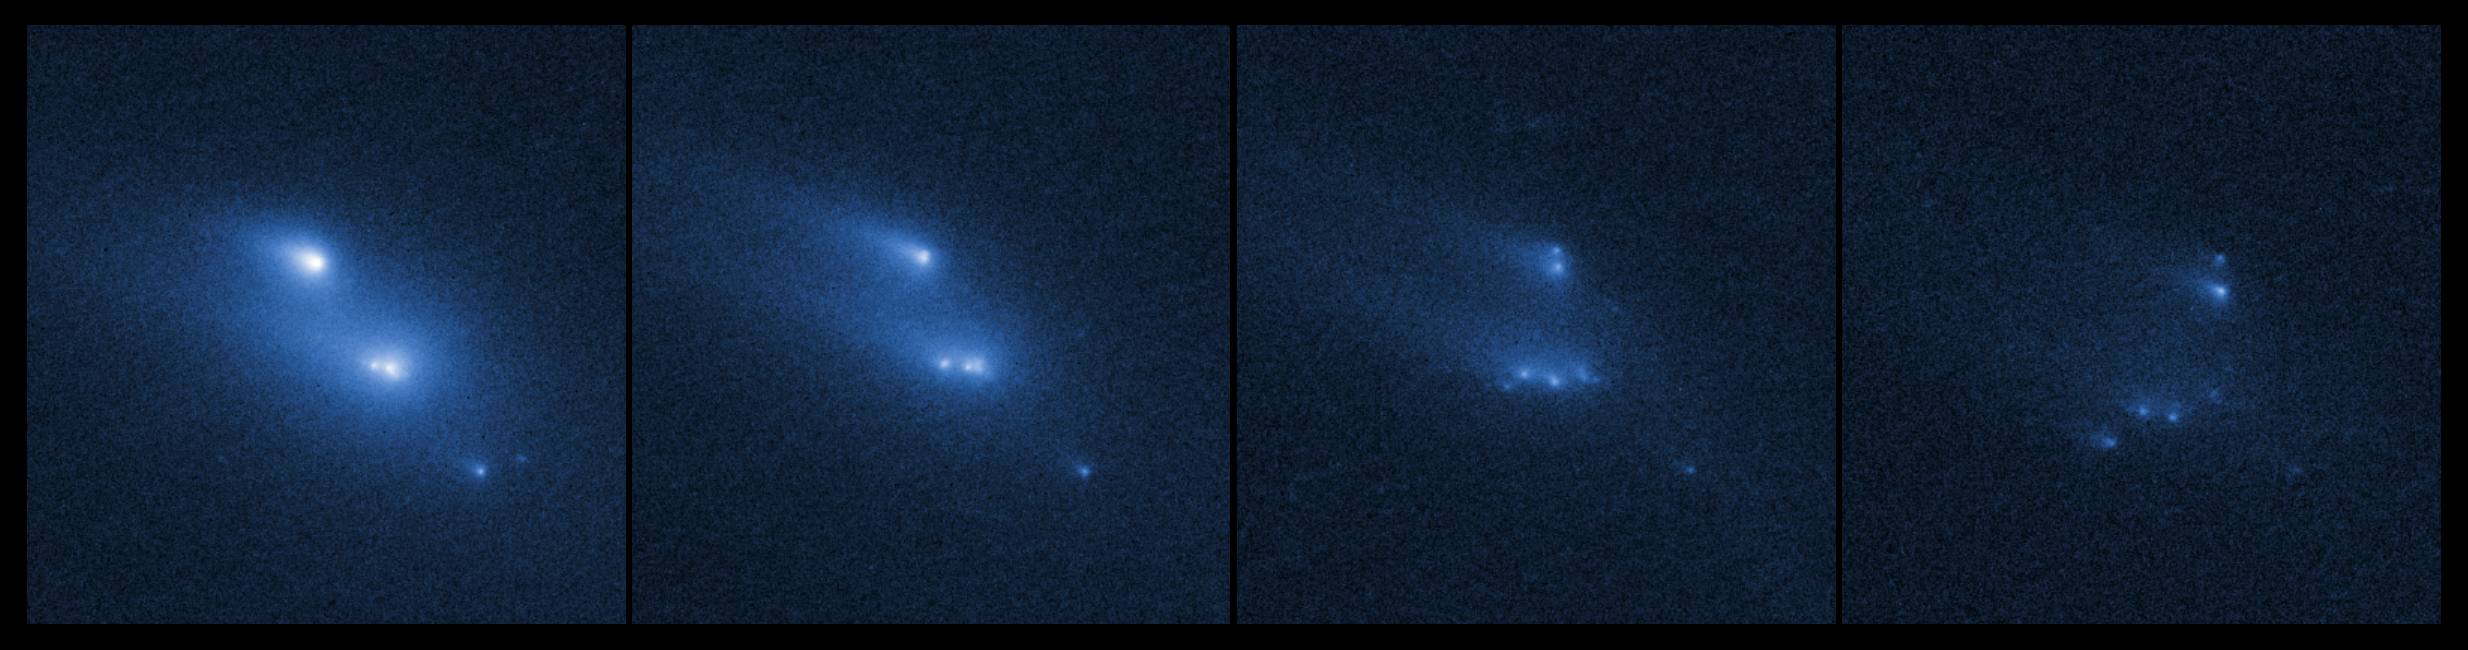

Asteroid P/2013 R3 breaks apart

This series of images shows the asteroid P/2013 R3 breaking apart, as viewed by the NASA/ESA Hubble Space Telescope in 2013. This is the first time that such a body has been seen to undergo this kind of break-up.

The Hubble observations showed that there are ten distinct objects, each with comet-like dust tails, embedded within the asteroid's dusty envelope. The four largest rocky fragments are up to 200 metres in radius, about twice the length of a football pitch.

The date increases from left to right, with frames from 29 October 2013, 15 November 2013, 13 December 2013, and 14 January 2014 respectively, showing how the clumps of debris material move around. The 14 January 2014 frame was not included in the science paper and is additional data.

Credit: NASA, ESA, D. Jewitt (UCLA)